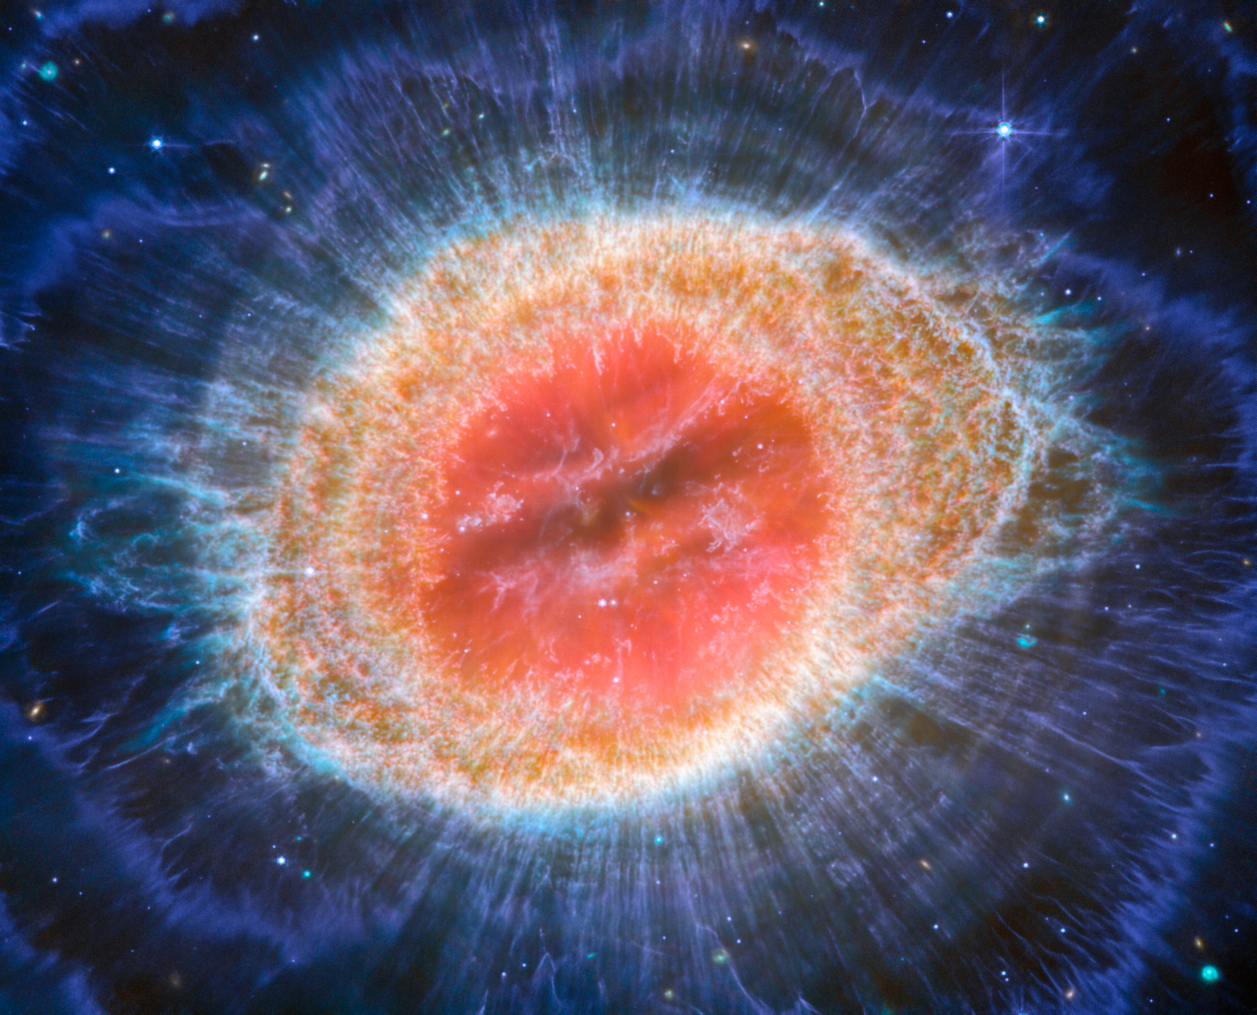

Webb captures detailed beauty of Ring Nebula (MIRI image)

The NASA/ESA/CSA James Webb Space Telescope has observed the well-known Ring Nebula with unprecedented detail. Formed by a star throwing off its outer layers as it runs out of fuel, the Ring Nebula is an archetypal planetary nebula. Also known as M57 and NGC 6720, it is both relatively close to Earth at roughly 2,500 light-years away.

This new image provides unprecedented spatial resolution and spectral sensitivity. In particular, Webb’s MIRI (Mid-InfraRed Instrument) reveals particular details in the concentric features in the outer regions of the nebulae’s ring (right).

There are some 20,000 dense globules in the nebula, which are rich in molecular hydrogen. In contrast, the inner region shows very hot gas. The main shell contains a thin ring of enhanced emission from
carbon-based molecules known as polycyclic aromatic hydrocarbons (PAHs). Roughly ten concentric arcs located just beyond the outer edge of the main ring. The arcs are thought to originate from the interaction of the central star with a low-mass companion orbiting at a distance comparable to that between the Earth and the dwarf planet Pluto. In this way, nebulae like the Ring Nebula reveal a kind of astronomical archaeology, as astronomers study the nebula to learn about the star that created it.

Credit: ESA/Webb, NASA, CSA, M. Barlow, N. Cox, R. Wesson